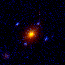

Hubble's Top Ten Gravitational Lenses. A View of HST 14176+5226

HST 14176+5226 is the first, and brightest lens system discovered in 1995 with the Hubble telescope. This lens candidate has now been confirmed spectroscopically using large ground-based telescopes. The elliptical lensing galaxy is located 7 billion light-years away, and the lensed quasar is about 11 billion light-years distant.

Credit: Kavan Ratnatunga (Carnegie Mellon Univ.) and NASA/ESA